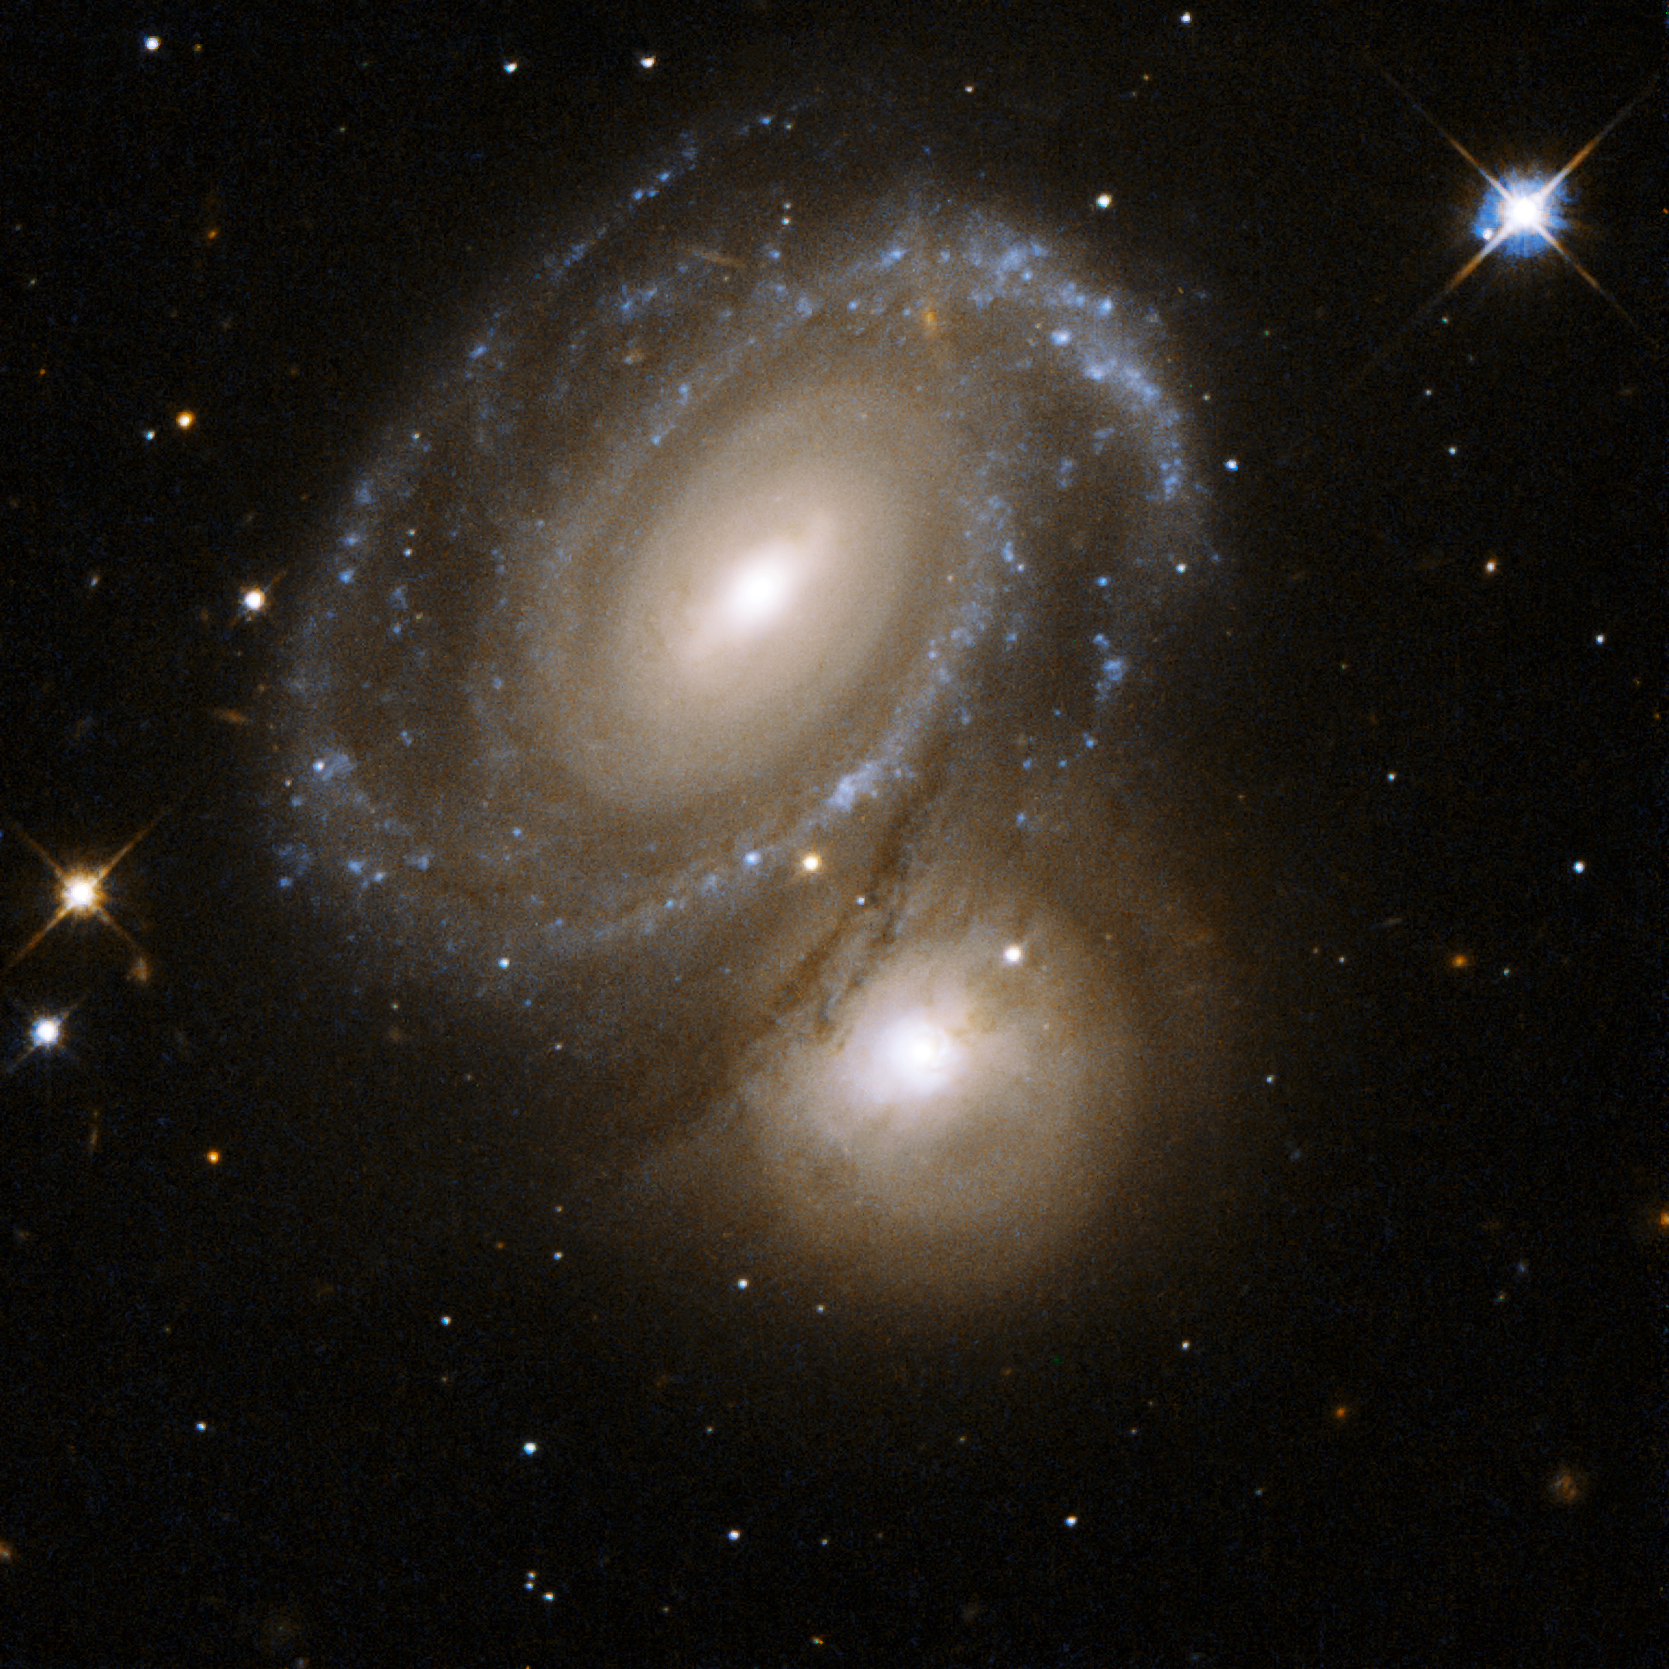

AM 0500-620

AM0500-620 consists of a highly symmetric spiral galaxy seen nearly face-on and partially backlit by a background galaxy. The foreground spiral galaxy has a number of dust lanes between its arms. The background galaxy was earlier classified as an elliptical galaxy, but Hubble has now revealed a galaxy with dusty spiral arms and bright knots of stars. AM0500-620 is 350 million light-years away from Earth in the constellation of Dorado, the Swordfish.

This image is part of a large collection of 59 images of merging galaxies taken by the Hubble Space Telescope and released on the occasion of its 18th anniversary on 24th April 2008.

Credit: NASA, ESA, the Hubble Heritage Team (STScI/AURA)-ESA/Hubble Collaboration and W. Keel (University of Alabama, Tuscaloosa)